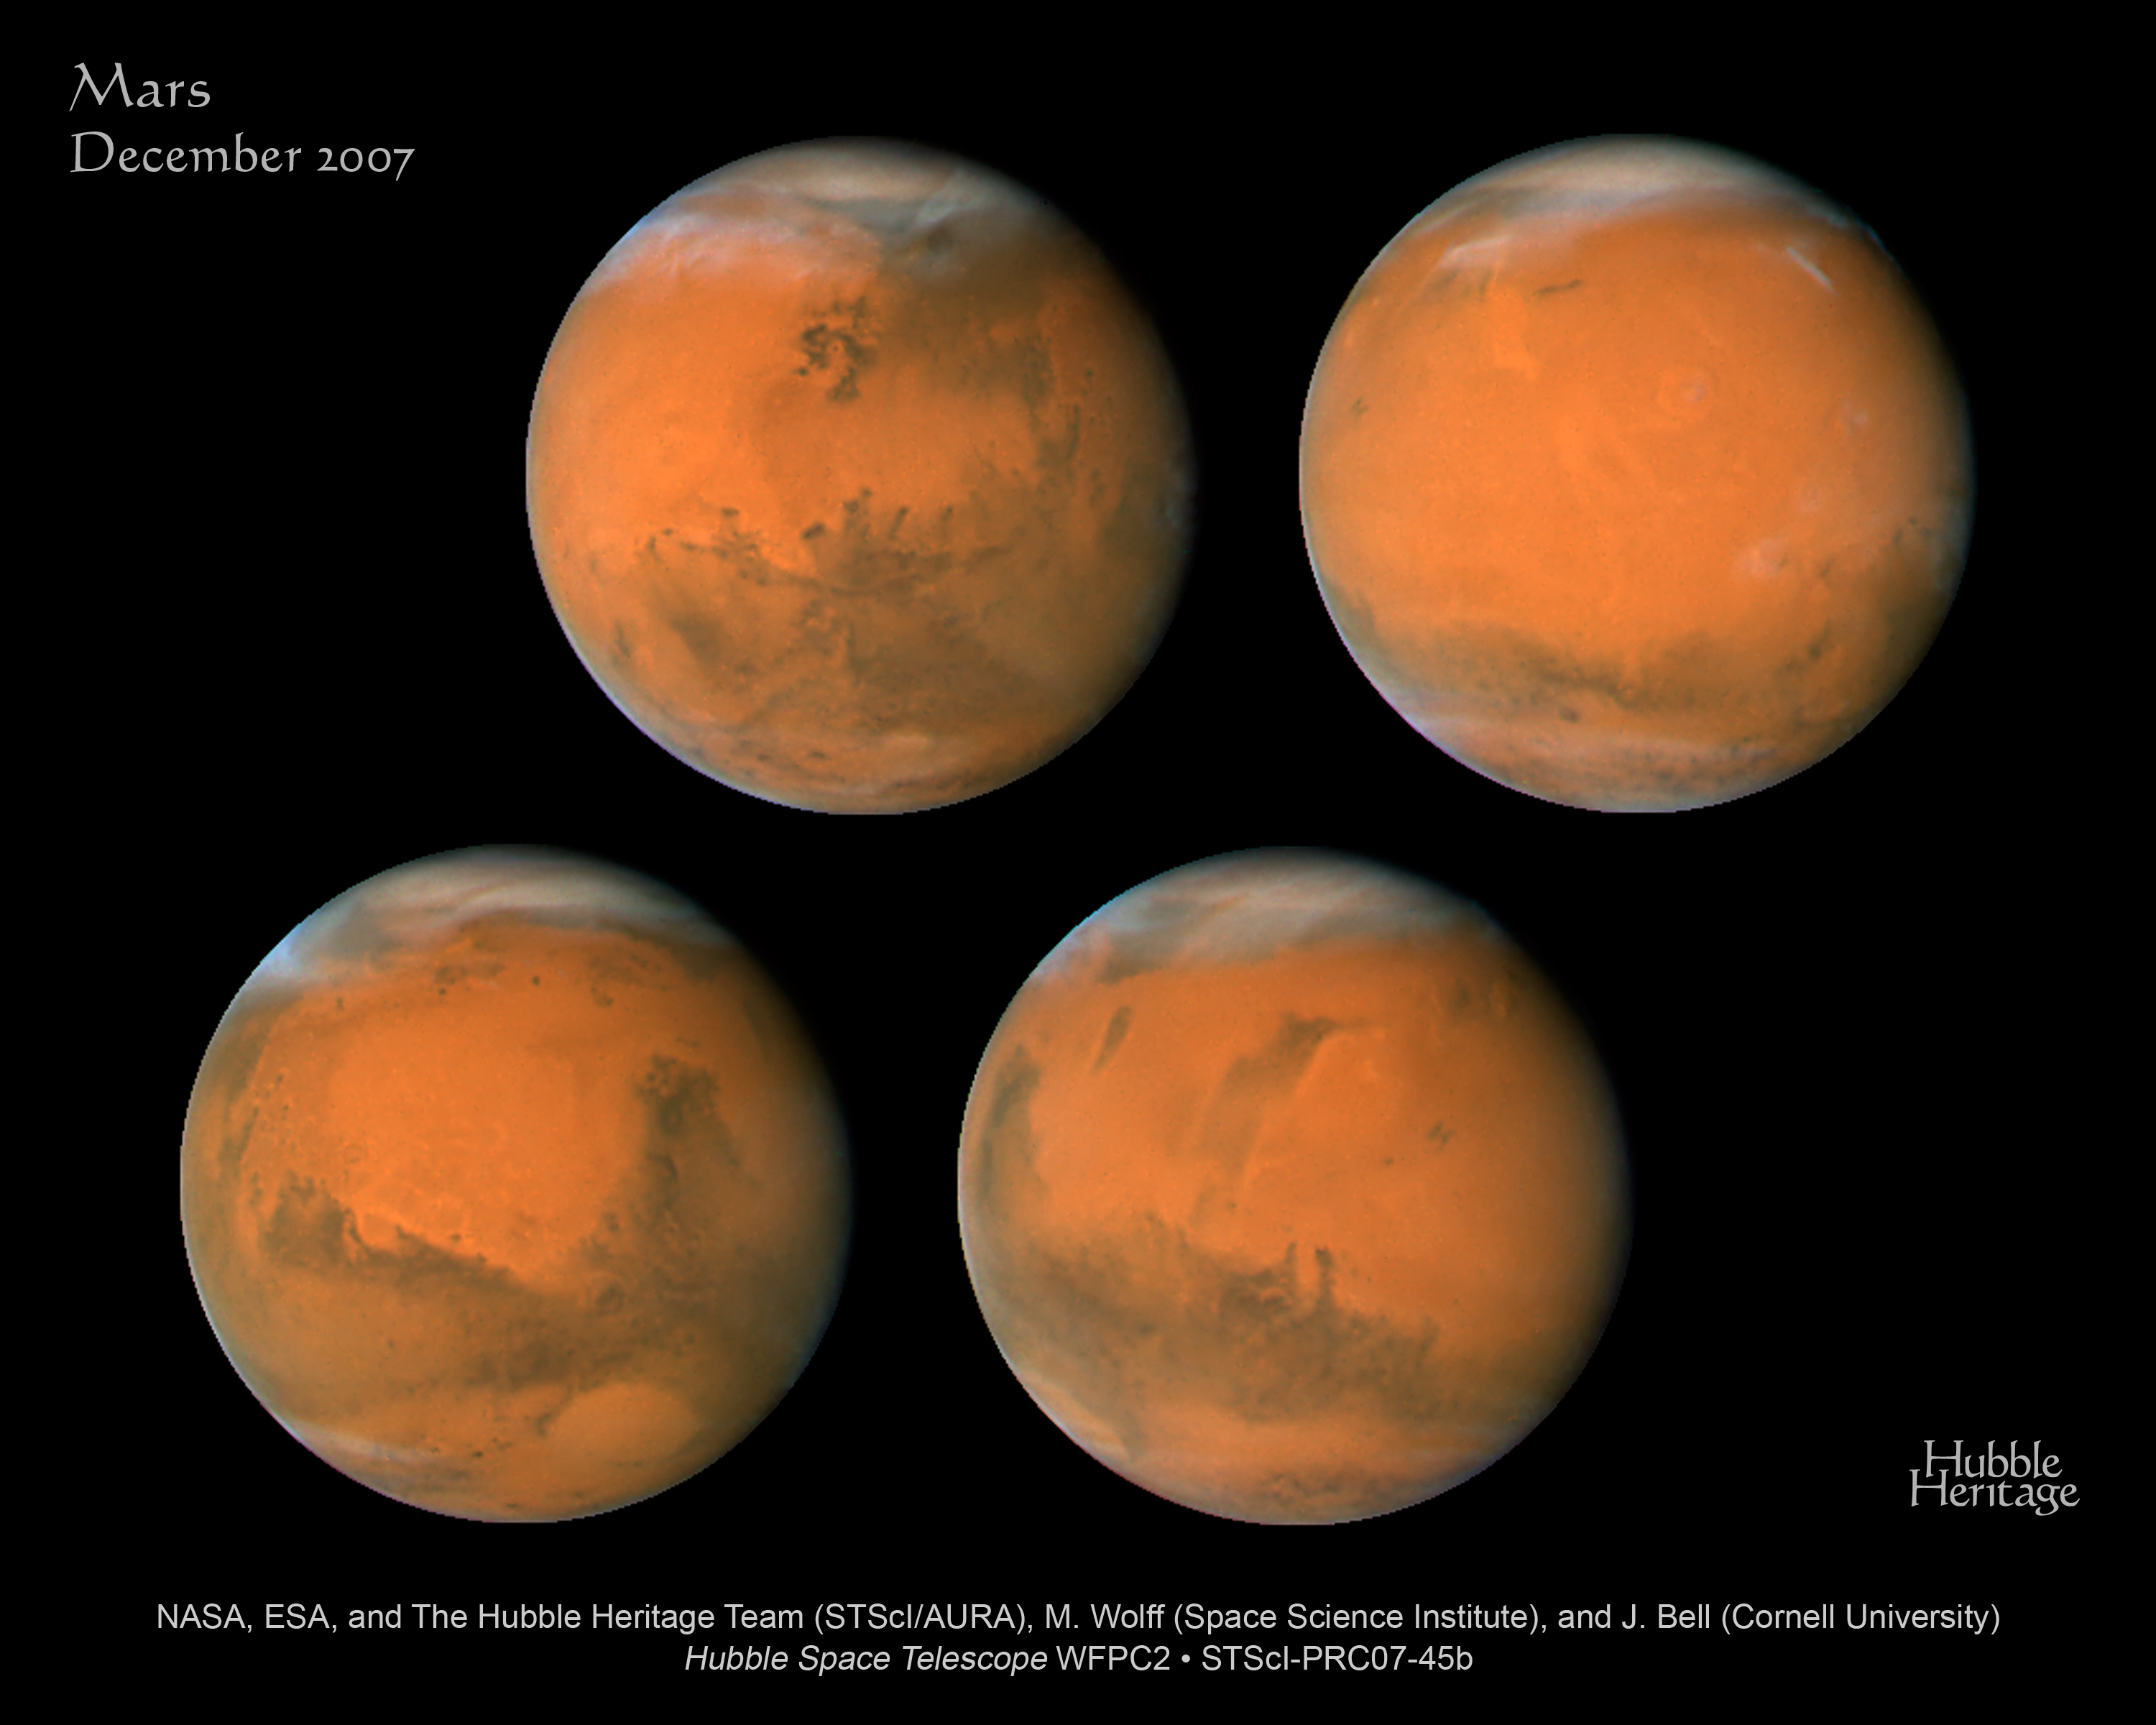

Mars: December 2007

In December 2007, the Mars closest approach and opposition will occur within a week of each other. This is an exciting time for astronomers and planetary geologists to image and study our planetary neighbor. On December 18, Mars will be the closest it has been in the last two years, reaching a distance of 88 million kilometres from Earth. This series of images was taken with Hubble's Wide Field Planetary Camera 2 on December 1-7, within two weeks of its December 2007 closest approach. Each image shows the planet rotating about 90 degrees from the next image. This gives astronomers a full-globe look at the Red Planet. [Top Left] - Mars on Dec. 1, 2007; longitude ~50 degrees. [Top Right] - Mars on Dec. 3, 2007; longitude ~225 degrees. [Bottom Left] - Mars on Dec. 3, 2007; longitude ~320 degrees. [Bottom Right] - Mars on Dec. 7, 2007; longitude ~140 degrees

Credit: NASA, ESA, the Hubble Heritage Team (STScI/AURA), J. Bell (Cornell University), and M. Wolff (Space Science Institute, Boulder)